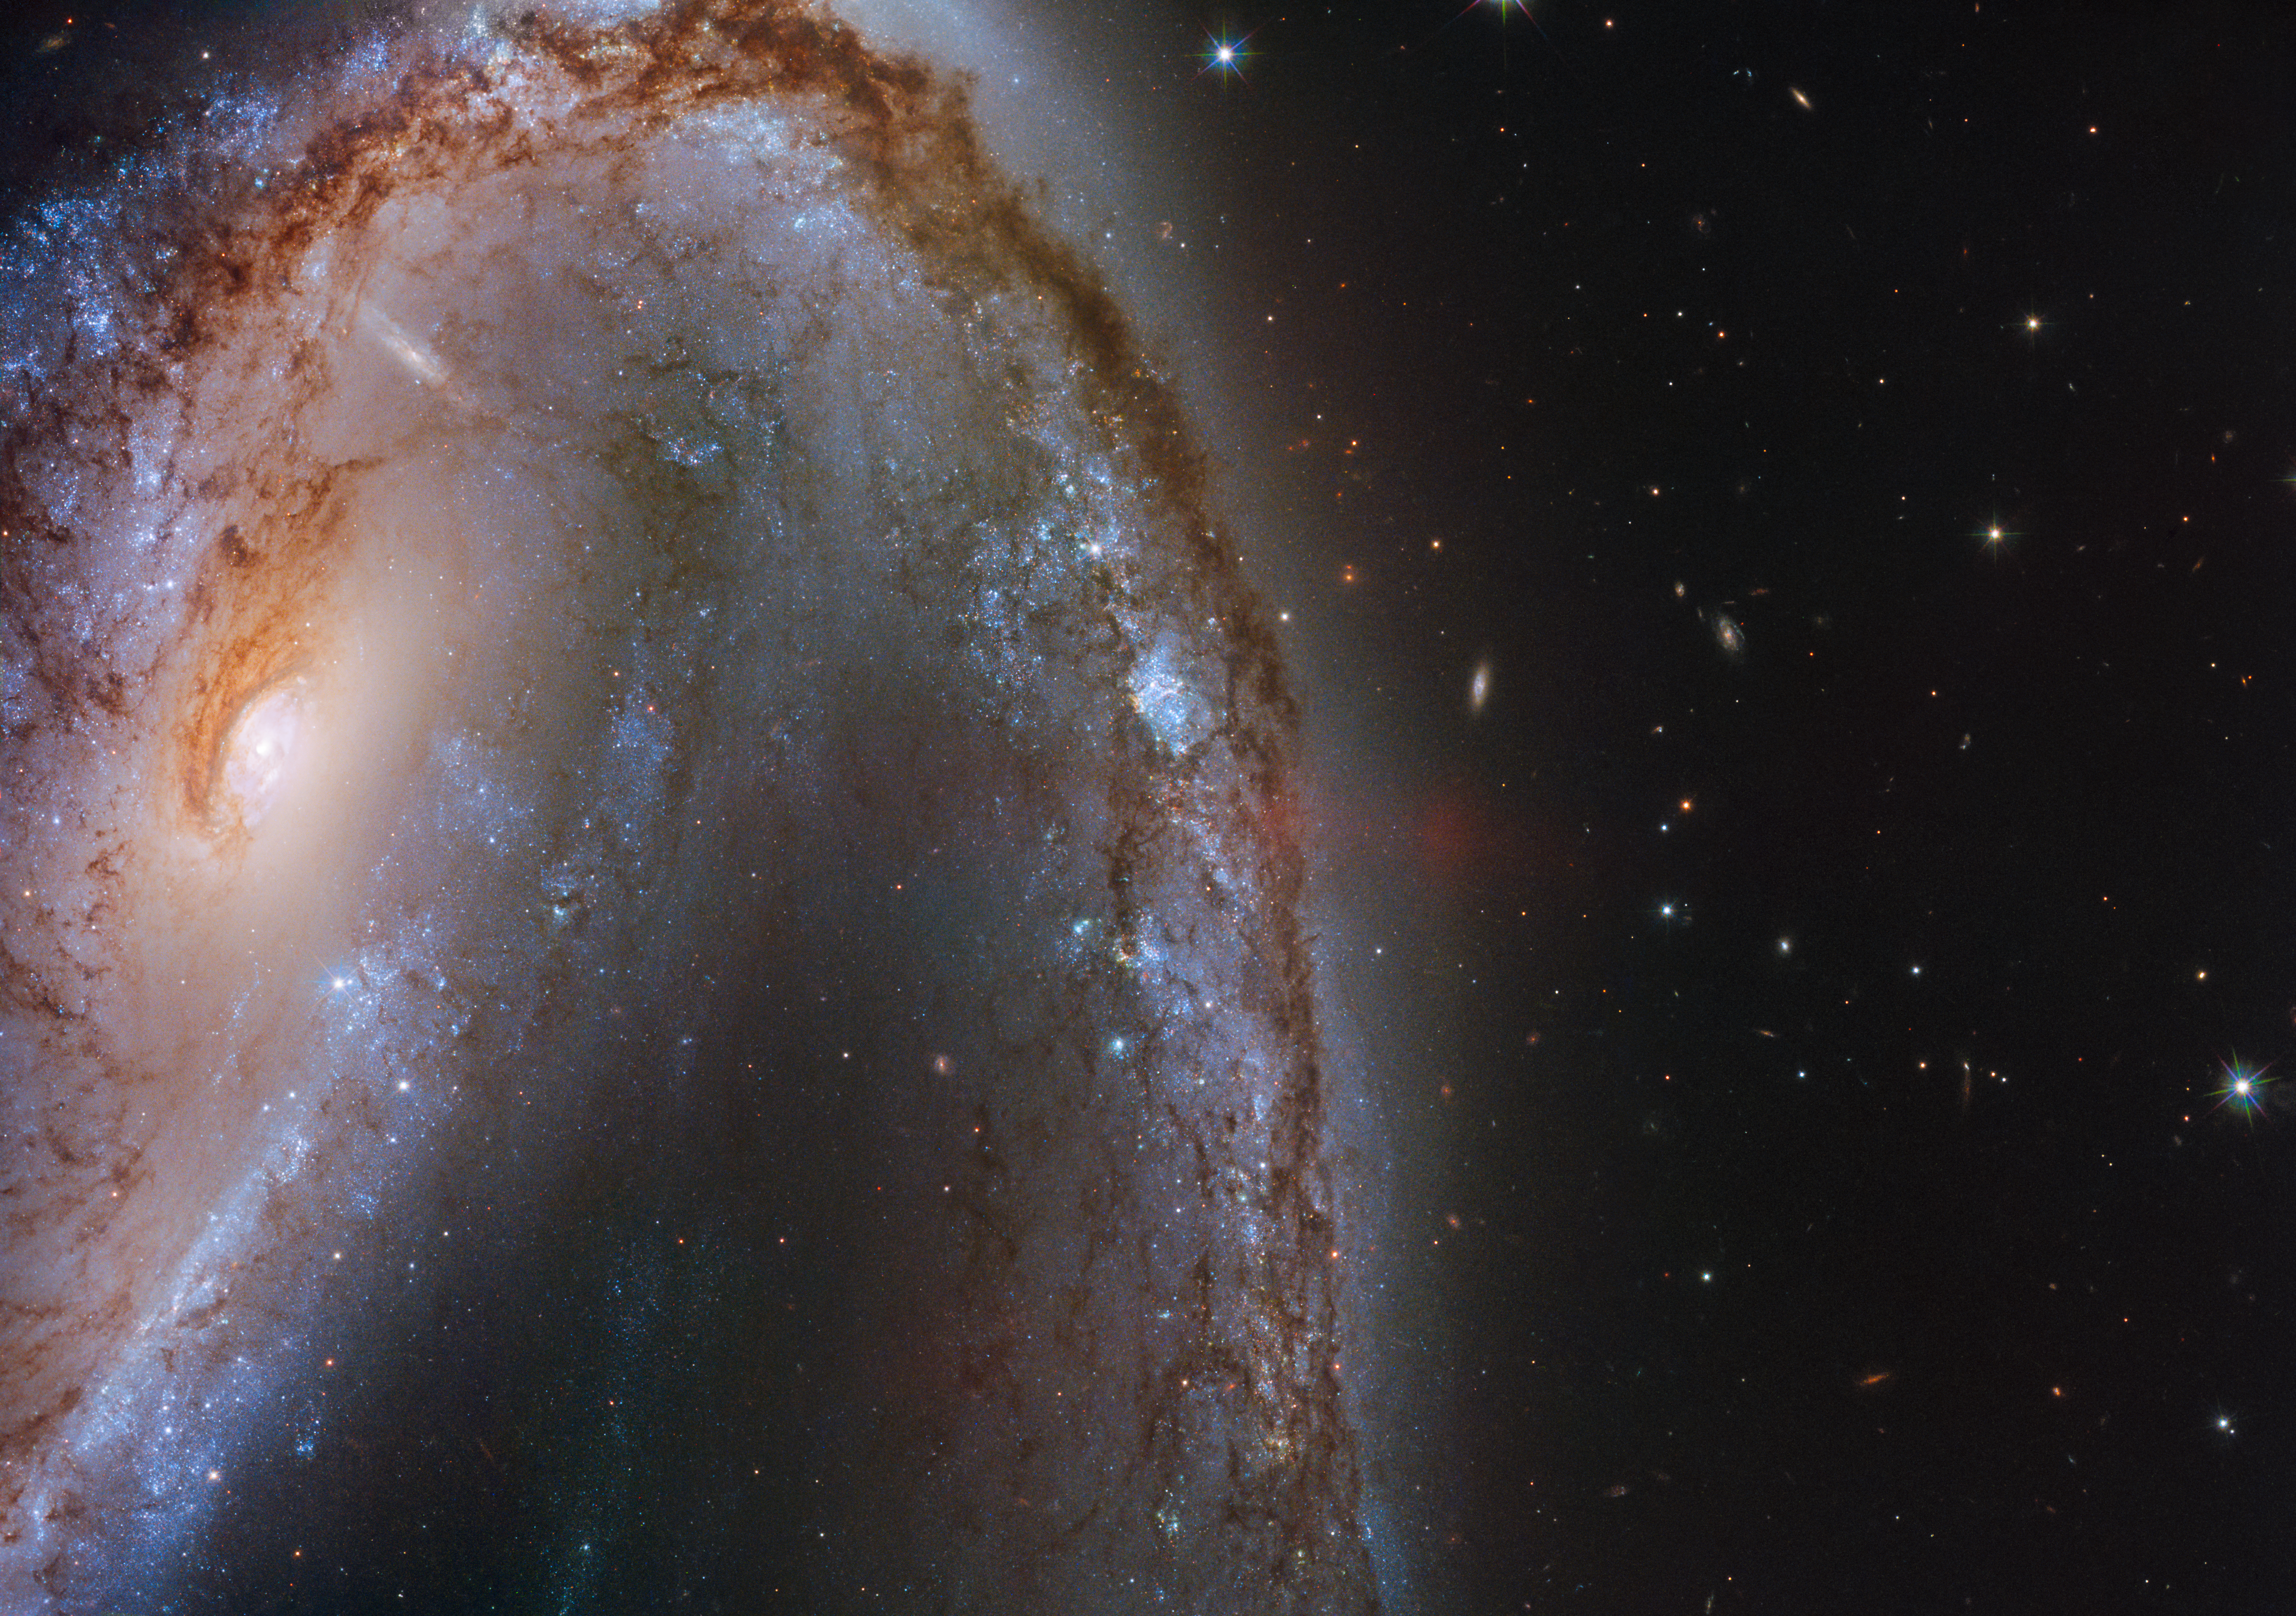

Cosmic Fireworks

This image from the NASA/ESA Hubble Space Telescope features the spectacular galaxy NGC 2442.

This galaxy was host to a supernova explosion, known as SN2015F, that was created by a white dwarf star. The white dwarf was part of a binary star system and syphoned mass from its companion, eventually becoming too greedy and taking on more than it could handle. This unbalanced the star and triggered runaway nuclear fusion that eventually led to an intensely violent supernova explosion.

SN2015F was spotted in March 2015 in the galaxy named NGC 2442, nicknamed the Meathook Galaxy owing to its extremely asymmetrical and irregular shape. The supernova shone brightly for quite some time and was easily visible from Earth through even a small telescope until later that summer.

Credit: ESA/Hubble & NASA, S. Smartt et al.